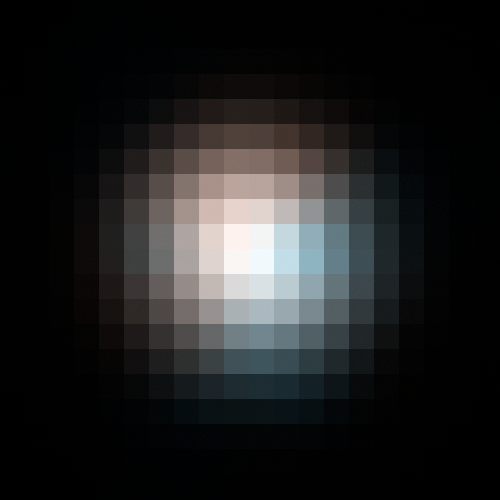

Planetary Host Star Enlarged Detail

Processed/resampled ACS/HRC image showing colour separation between lens (planet host) and lensed star.

Credit: NASA, ESA, D. Bennett (University of Notre Dame), and J. Anderson (Rice University)